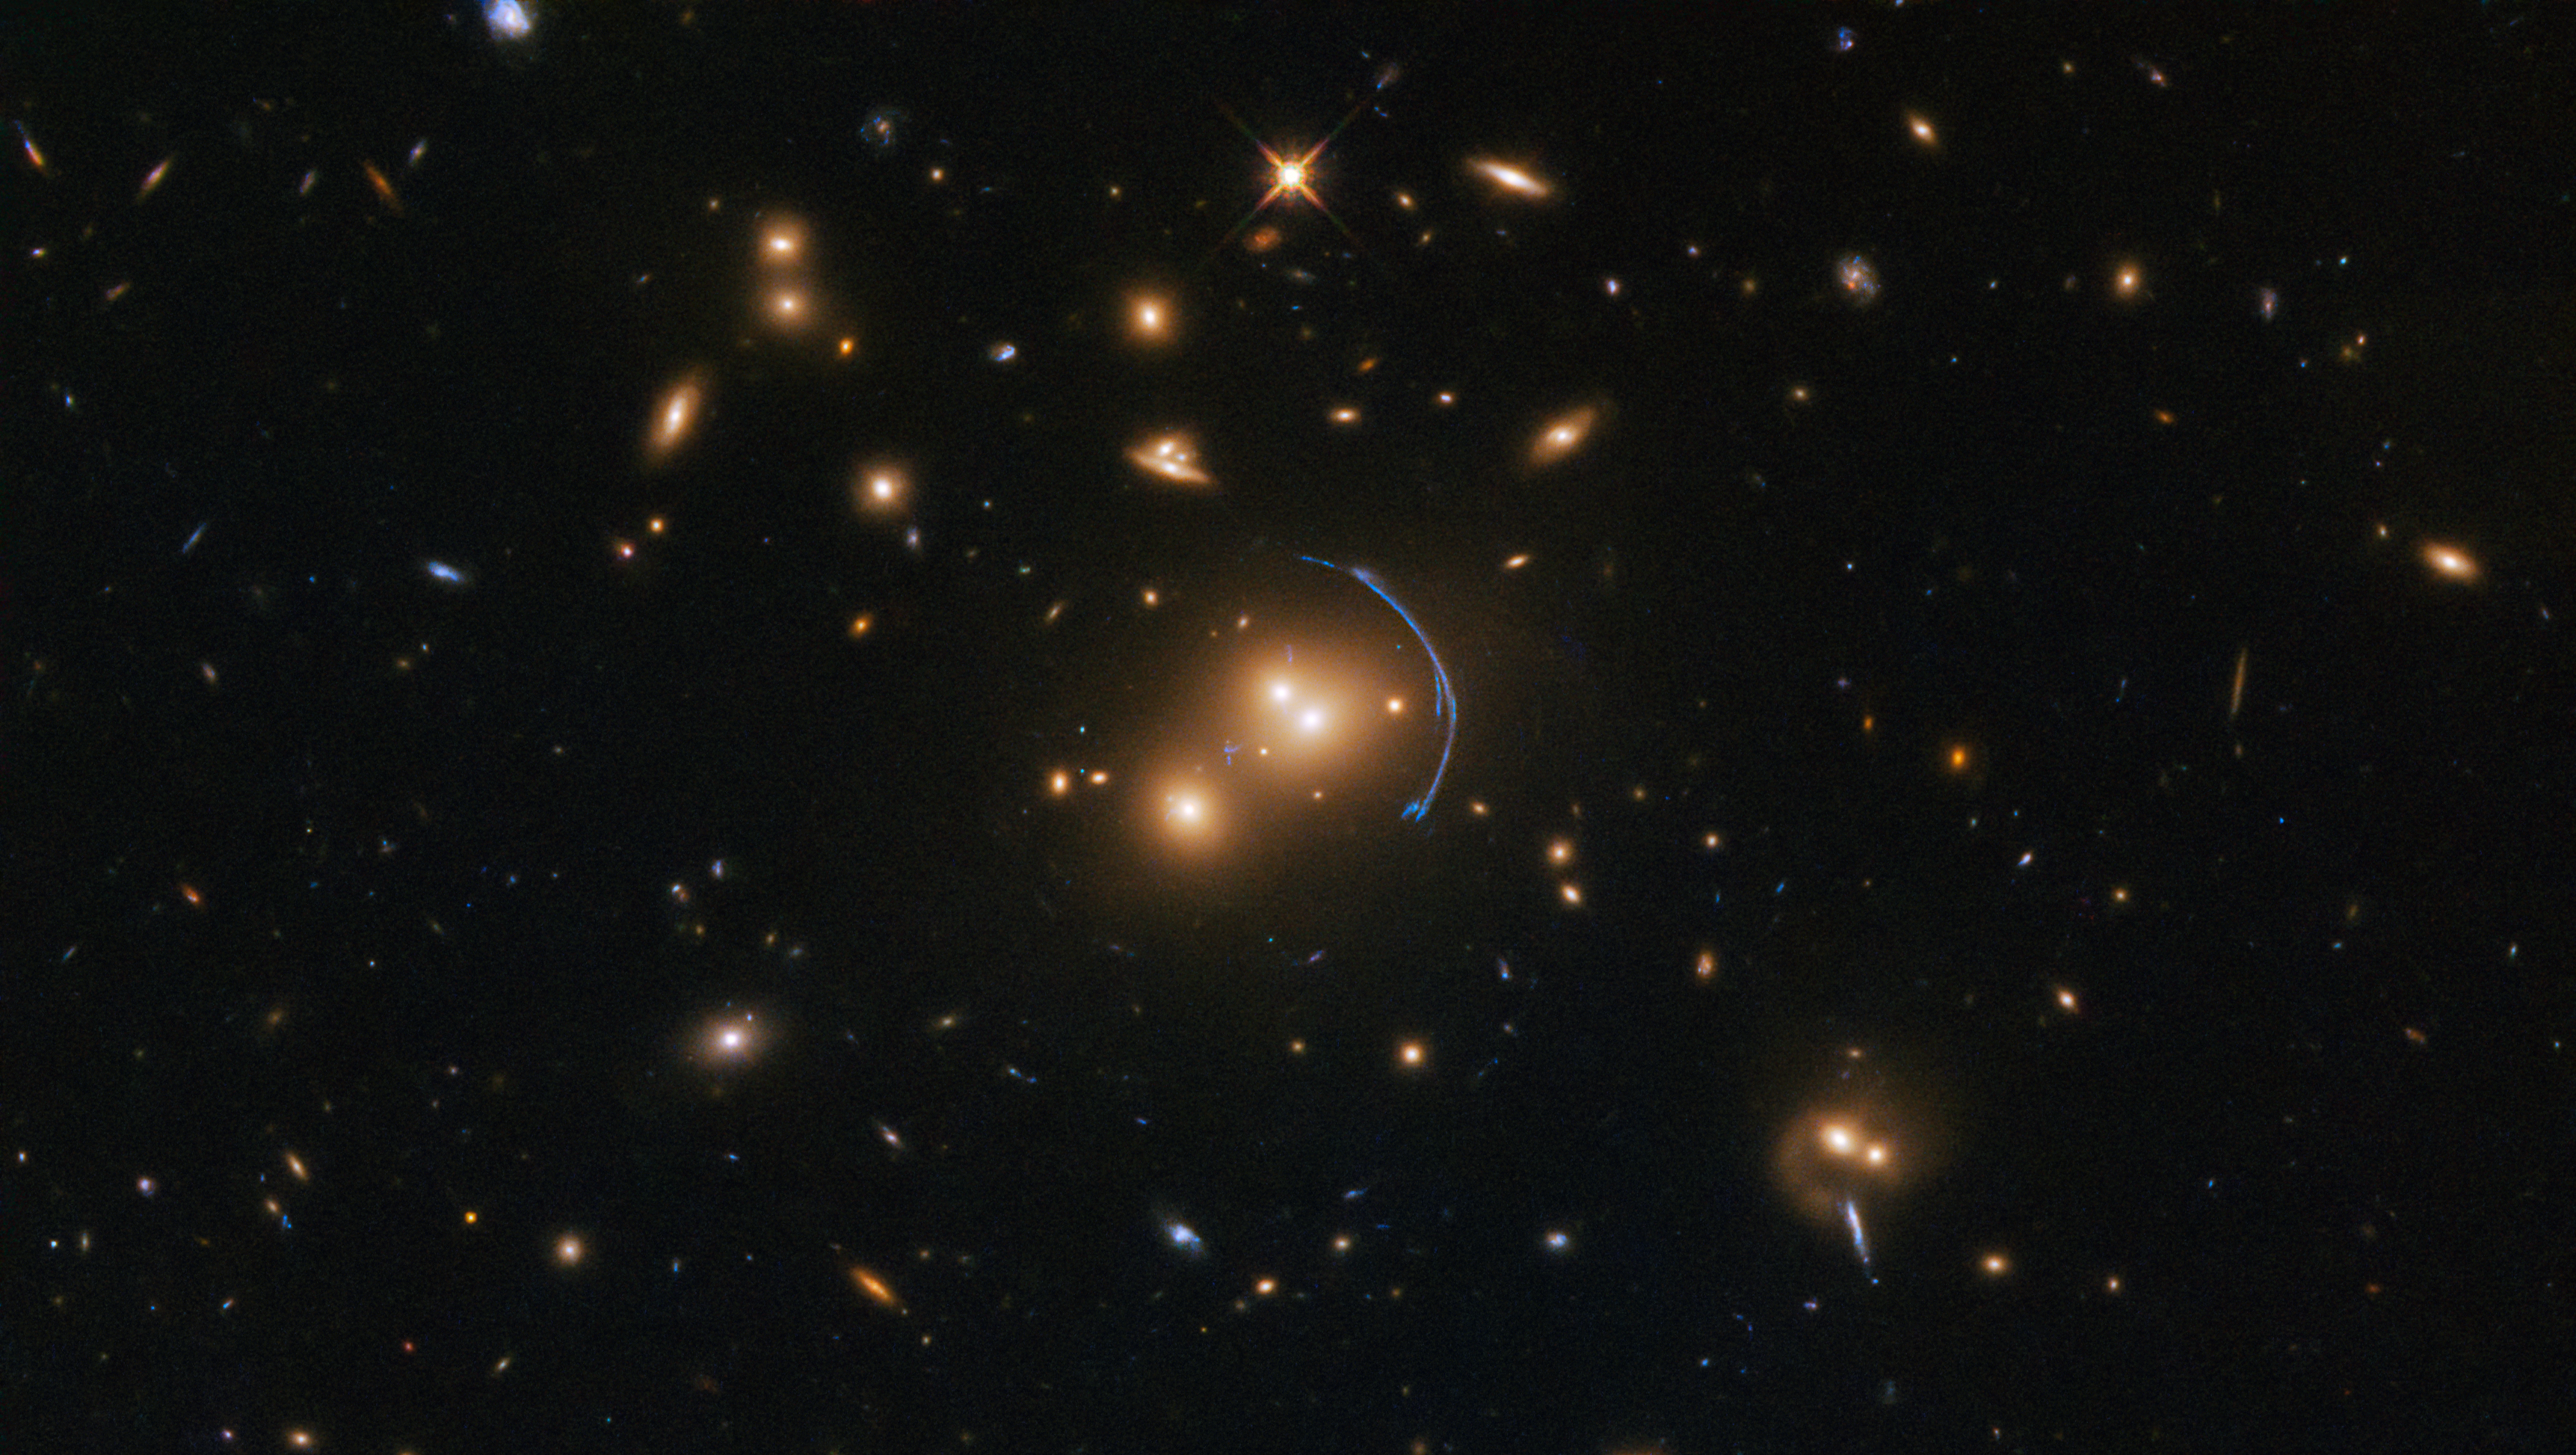

Probing the distant past

Obtained for a research programme on star formation in old and distant galaxies, this NASA/ESA Hubble Space Telescope image obtained with its Wide Field Camera 3 (WFC3) demonstrates the immense effects of gravity; more specifically, it shows the effects of gravitational lensing caused by an object called SDSS J1152+3313.

Gravitational lenses — such as this galaxy cluster SDSS J1152+3313 — possess immense masses that warp their surroundings and bend the light from faraway objects into rings, arcs, streaks, blurs, and other odd shapes. This lens, however, is not only warpping the appearance of a distant galaxy — it is also amplifying its light, making it appear much brighter than it would be without the lens. Combined with the high image quality obtainable with Hubble, this gives valuable clues into how stars formed in the early Universe.

Star formation is a key process in astronomy. Everything that emits light is somehow connected to stars, so understanding how stars form is key to understanding countless objects lying across the cosmos. Astronomers can probe these early star-forming regions to learn about the sizes, luminosities, formation rates, and generations of different types of stars.

Credit: ESA/Hubble & NASA Acknowledgement: Judy Schmidt (Geckzilla)